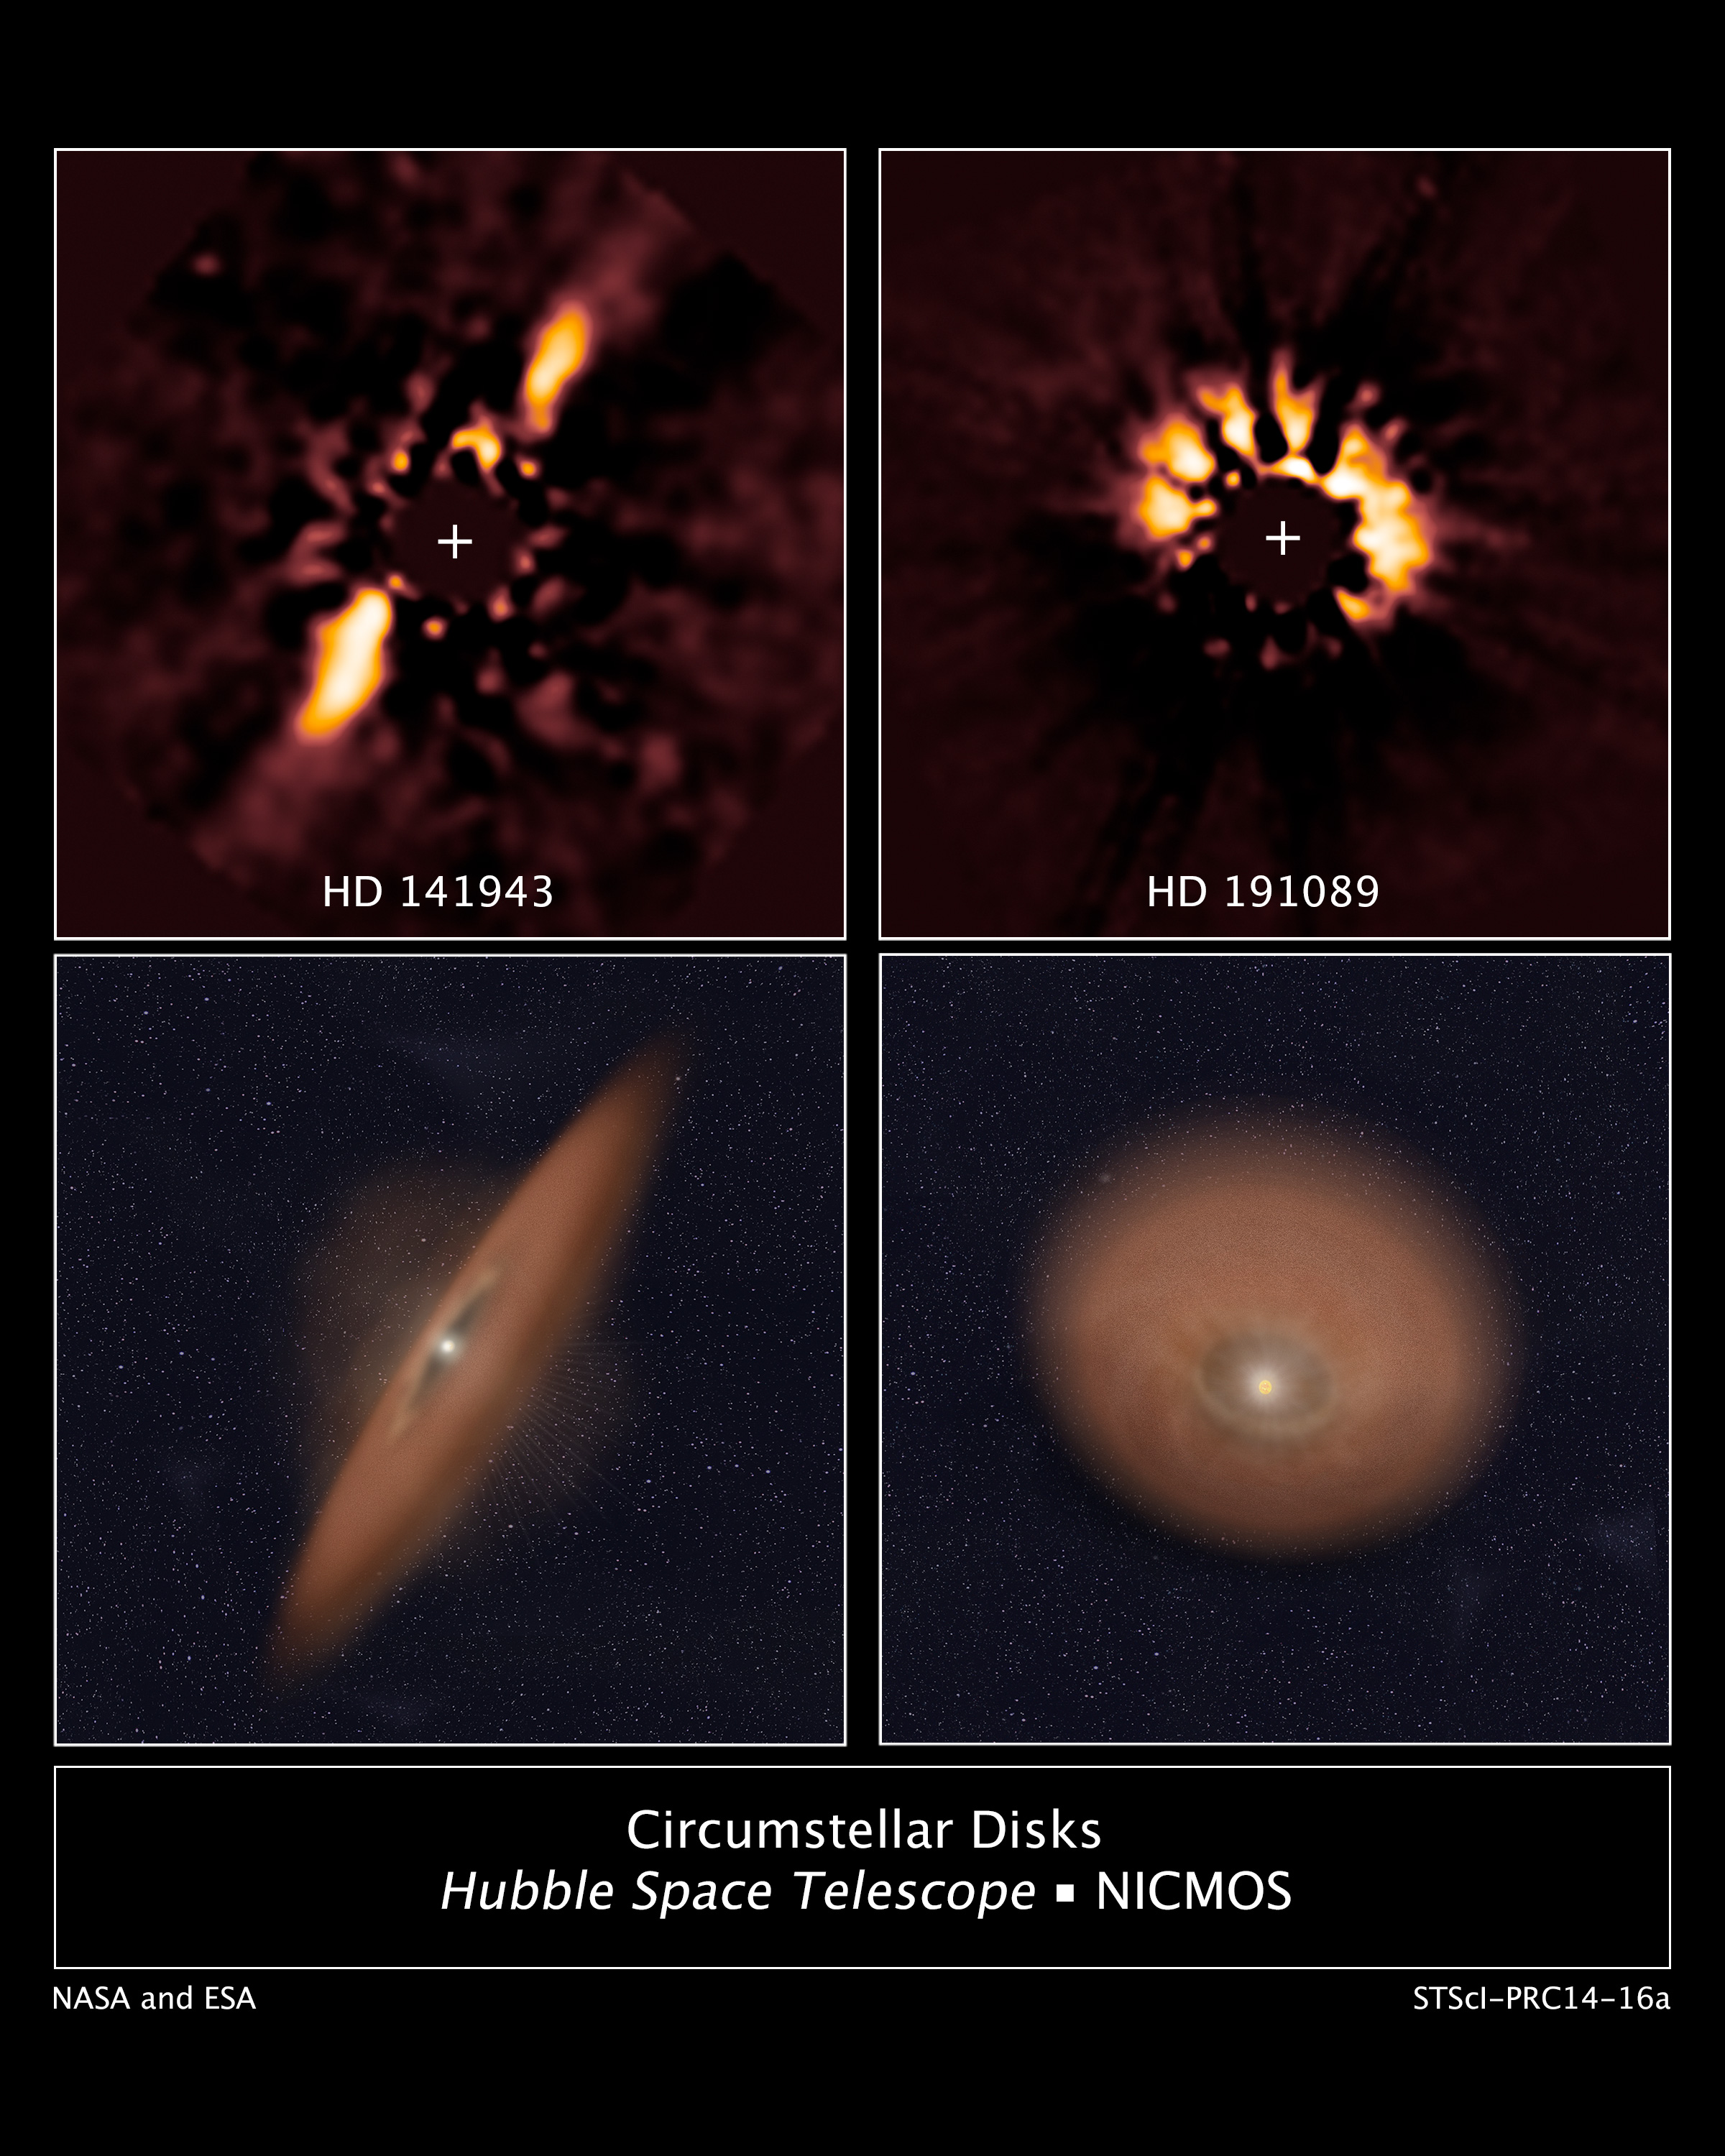

Circumstellar disks HD 141943 and HD 191089

The two panels at the top of this image reveal debris discs around young Sun-like stars. These were uncovered in archival images taken by the NASA/ESA Hubble Space Telescope.

Hubble's Near Infrared Camera and Multi-object Spectrometer observed these discs in near-infrared in 2007. Astronomers blocked out the bright light from each star in order to analyse the faint light reflected off dust particles in the discs.

The illustration beneath each image depicts the orientation of the debris discs.

Astronomers retrieved these images from the Barbara A. Mikulski Archive for Space Telescopes (MAST) and used more powerful image analysis techniques to search for planetary systems.

Credit: NASA, ESA, and R. Soummer (STScI)